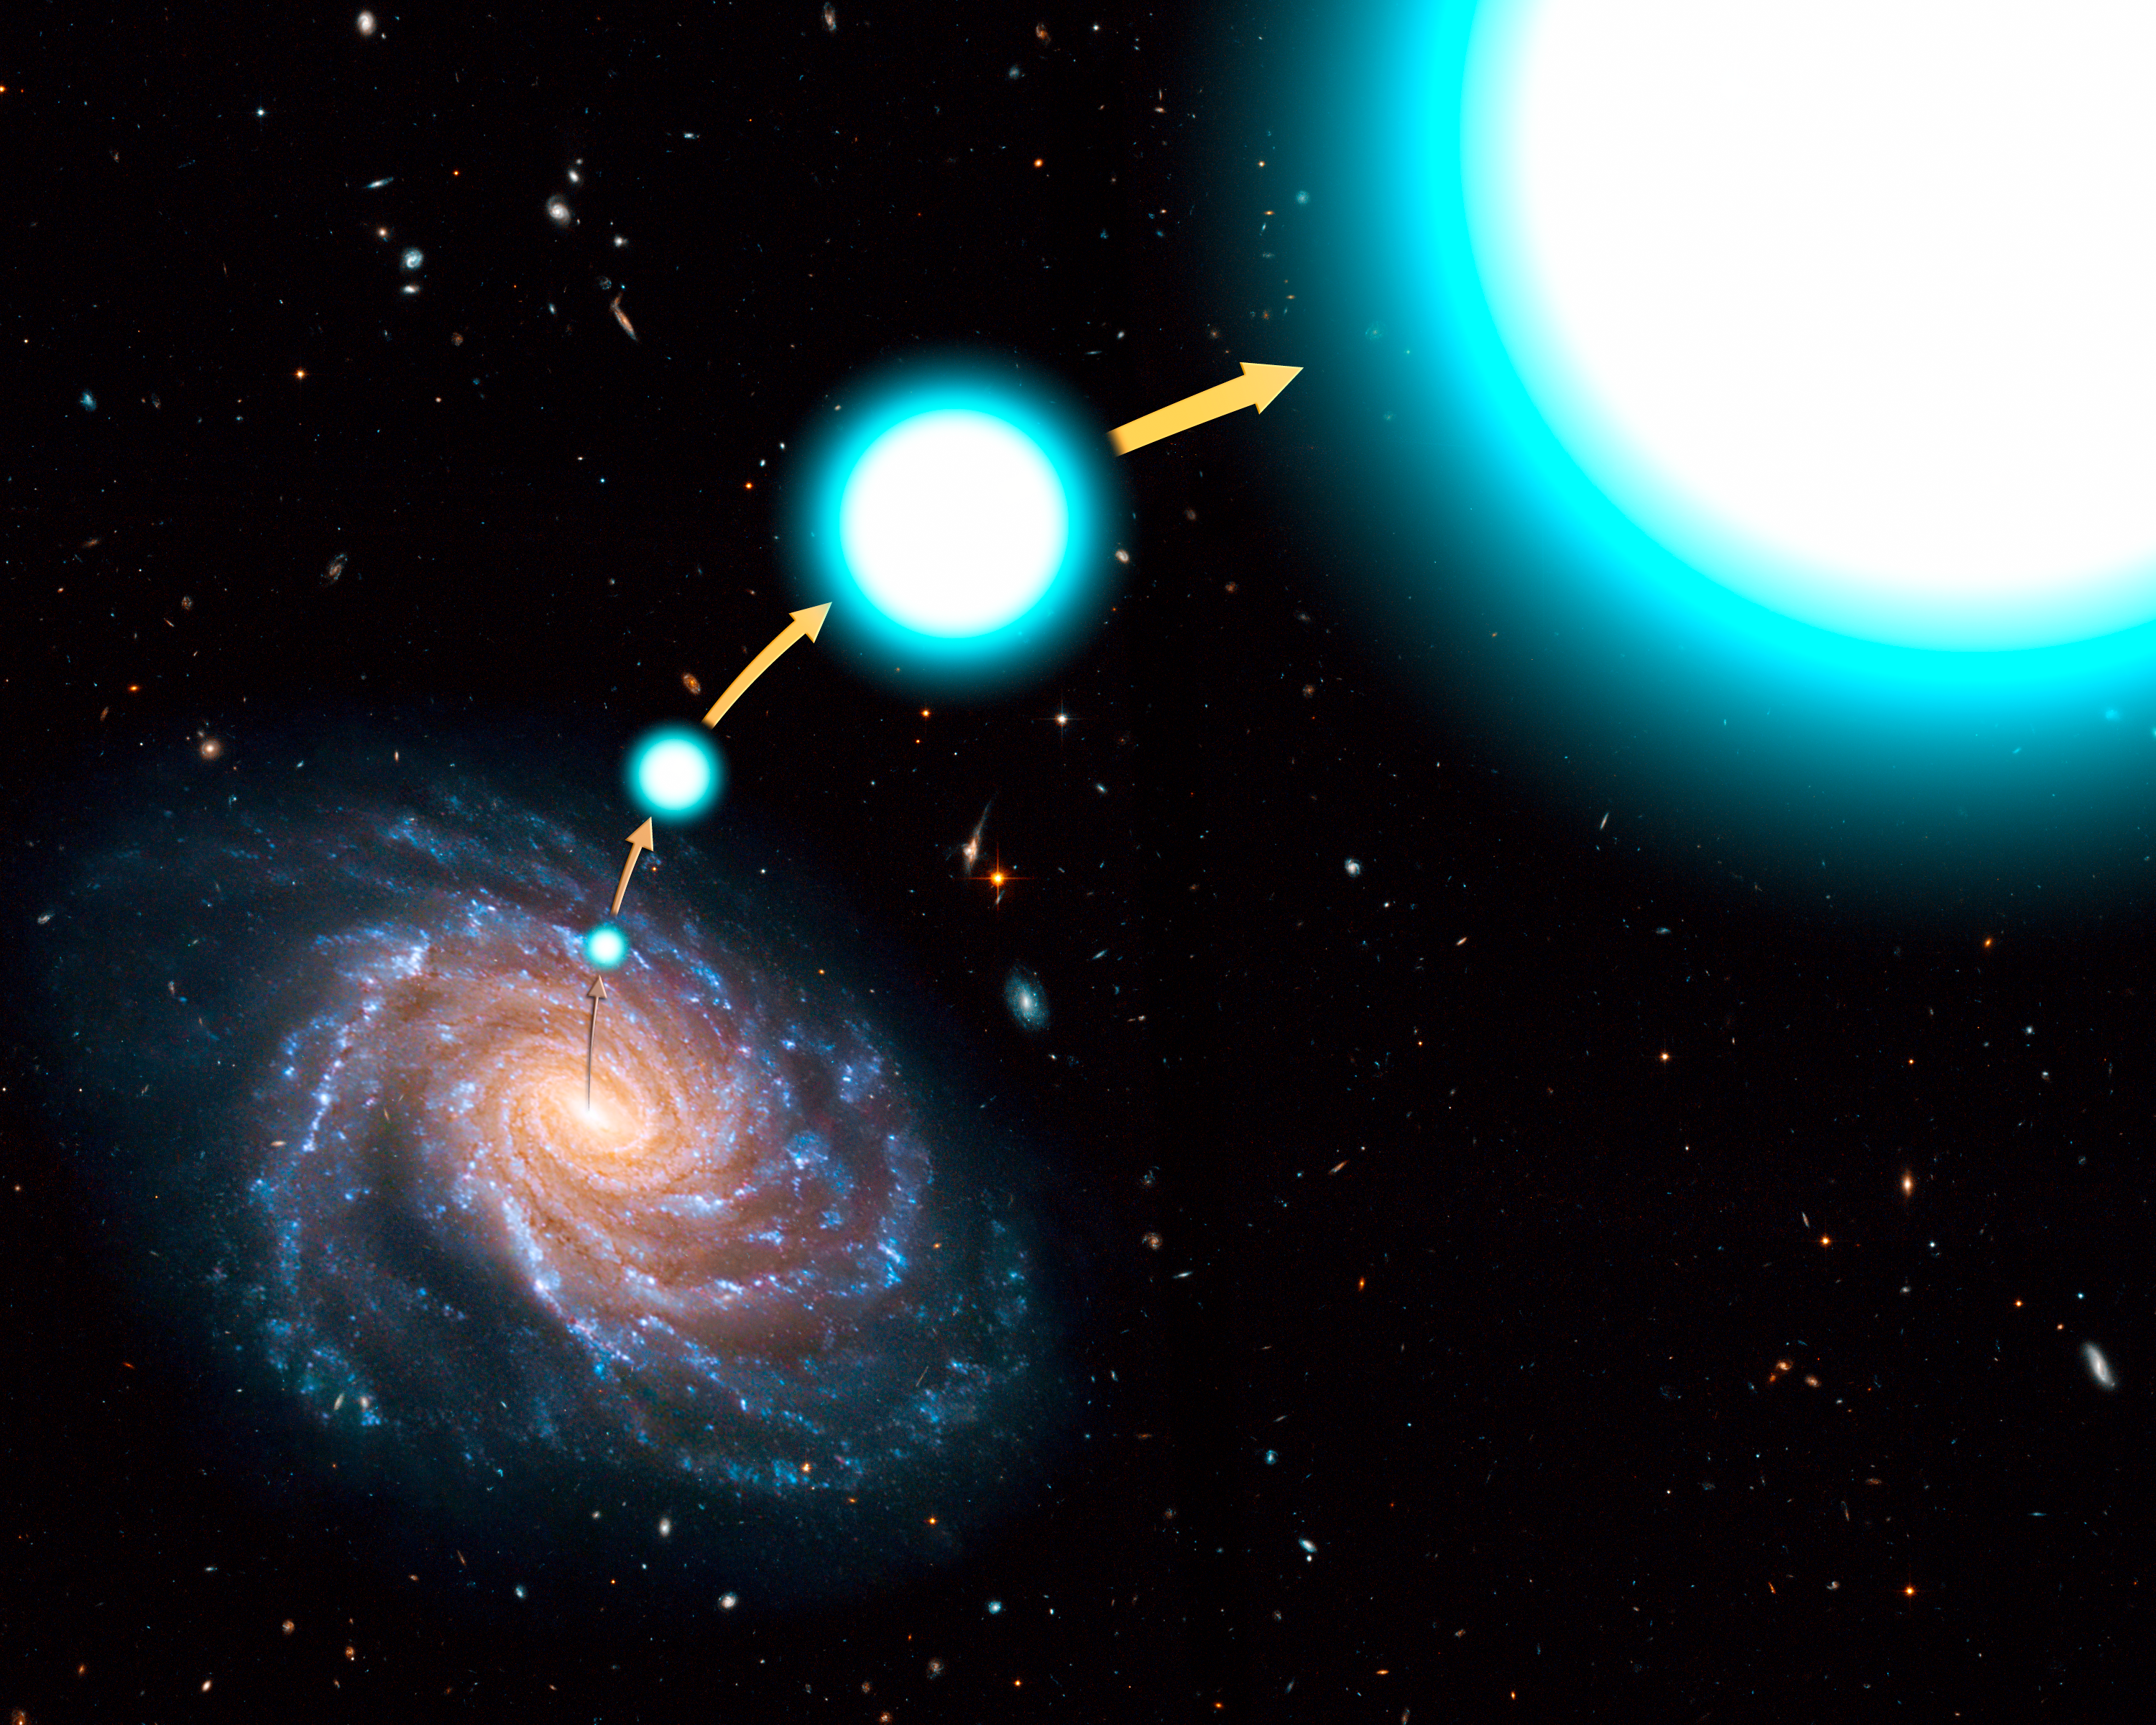

Going, going, gone: star leaves the Milky Way

In this illustration, the hot, blue star HE 0437-5439 has been tossed out of the centre of our Milky Way galaxy with enough speed to escape the galaxy's gravitational clutches. The stellar outcast is rocketing through the Milky Way's distant outskirts at 2.6 million kilometres per hour, high above the galaxy's disk, about 200,000 light-years from the centre. The star is destined to roam intergalactic space.

Credit: NASA, ESA, and G. Bacon (STScI). Science Credit: NASA, ESA, O. Gnedin (University of Michigan, Ann Arbor, USA), and W. Brown (Harvard-Smithsonian Center for Astrophysics, Cambridge, Mass., USA)